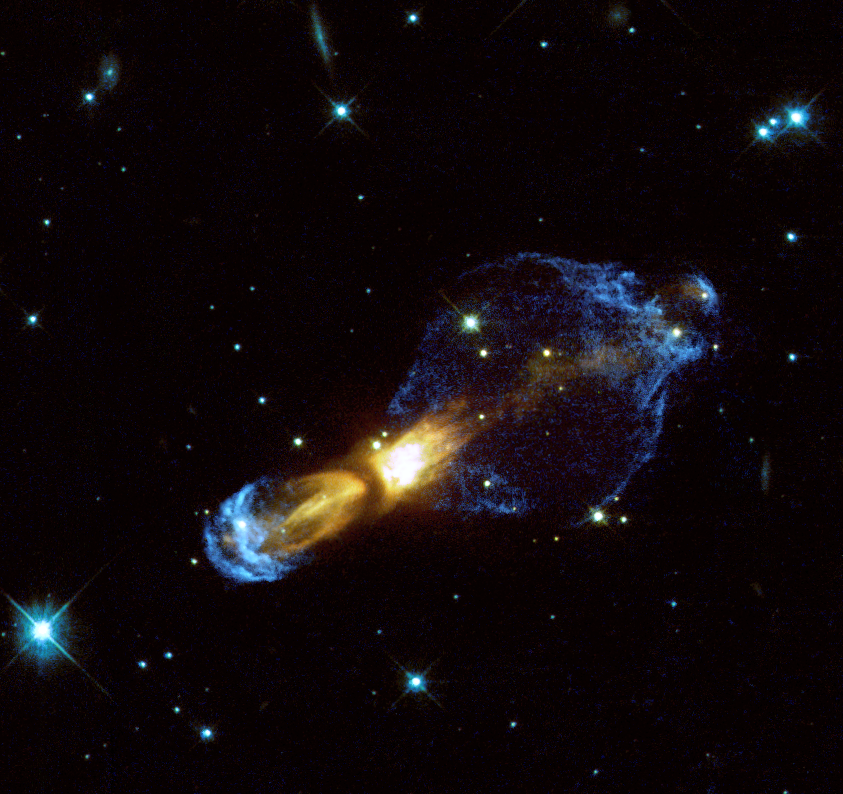

Hubble reveals previously unseen shocks

This new, detailed, Hubble image shows a planetary nebula in the making of a proto-planetary nebula. A dying star (hidden behind dust and gas in the centre of the nebula) has ejected massive amounts of gas. Parts of the gas have reached tremendous velocities of up to one-and-a-half million kilometres per hour. Shown in blue is light from hydrogen and ionised nitrogen arising from supersonic shocks where the gas stream rams into the surrounding material. The image shows for the first time these complex gas structures which are predicted by theory. The Hubble image was taken shortly before Christmas 2000 with the WFPC2 instrument (Wide Field and Planetary Camera 2) in four different filters. Here, light from 791 nm is displayed in red (exposure time 900 s), 675 nm in green (900 s), while combined light from hydrogen (656 nm) and ionised nitrogen atoms (658 nm) are shown as blue (14, 700 s).

Credit: ESA & Valentin Bujarrabal (Observatorio Astronomico Nacional, Spain)